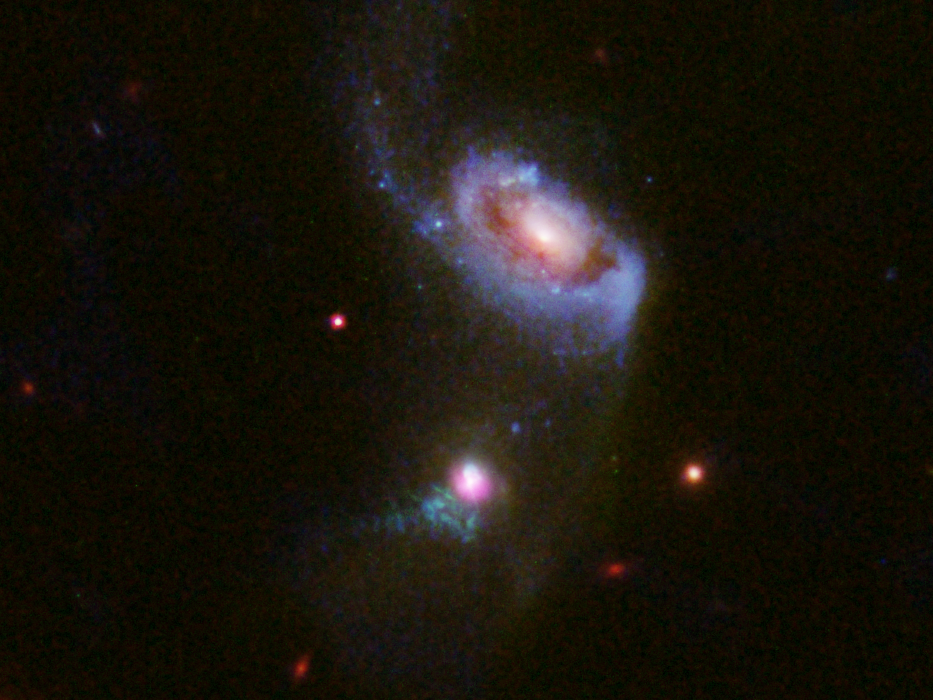

Hubble views a supermassive black hole burping — twice

Researchers using a suite of telescopes including the NASA/ESA Hubble Space Telescope have spotted a supermassive black hole blowing huge bubbles of hot, bright gas — one bubble is currently expanding outwards from the black hole, while another older bubble slowly fades away. This cosmic behemoth sits within the galaxy at the bottom of this image, which lies 900 million light-years from Earth and is known as SDSS J1354+1327. The upper, larger, galaxy is known as SDSS J1354+1328.

Supermassive which can have a mass equivalent to billions of suns, are found in the centre of most galaxies (including the Milky Way). These black holes are able to “feed” on their surroundings, causing them to shine brilliantly as Active Galactic Nuclei (AGN). However, this feeding process is not continuous as it depends on how much matter is available for the black hole to consume; if the surrounding material is clumpy and irregular, an AGN can be seen turning “off” and “on”, and flickering over long cosmic timescales.

This clumpy accretion is what scientists believe has happened with the black hole in SDSS J1354+1327. Scientists believe these two outflows of material are the result of the black hole burping out material after two different feeding events. The first outburst created the fading southern relic: a cone of gas measuring 33 000 light-years across. Around 100 000 years later, a second burst spawned the more compact and radiant outflow emanating from the top of the galaxy: a cone of shocked gas some 3300 light-years across.

Credit: NASA, ESA, and J. Comerford (University of Colorado-Boulder)